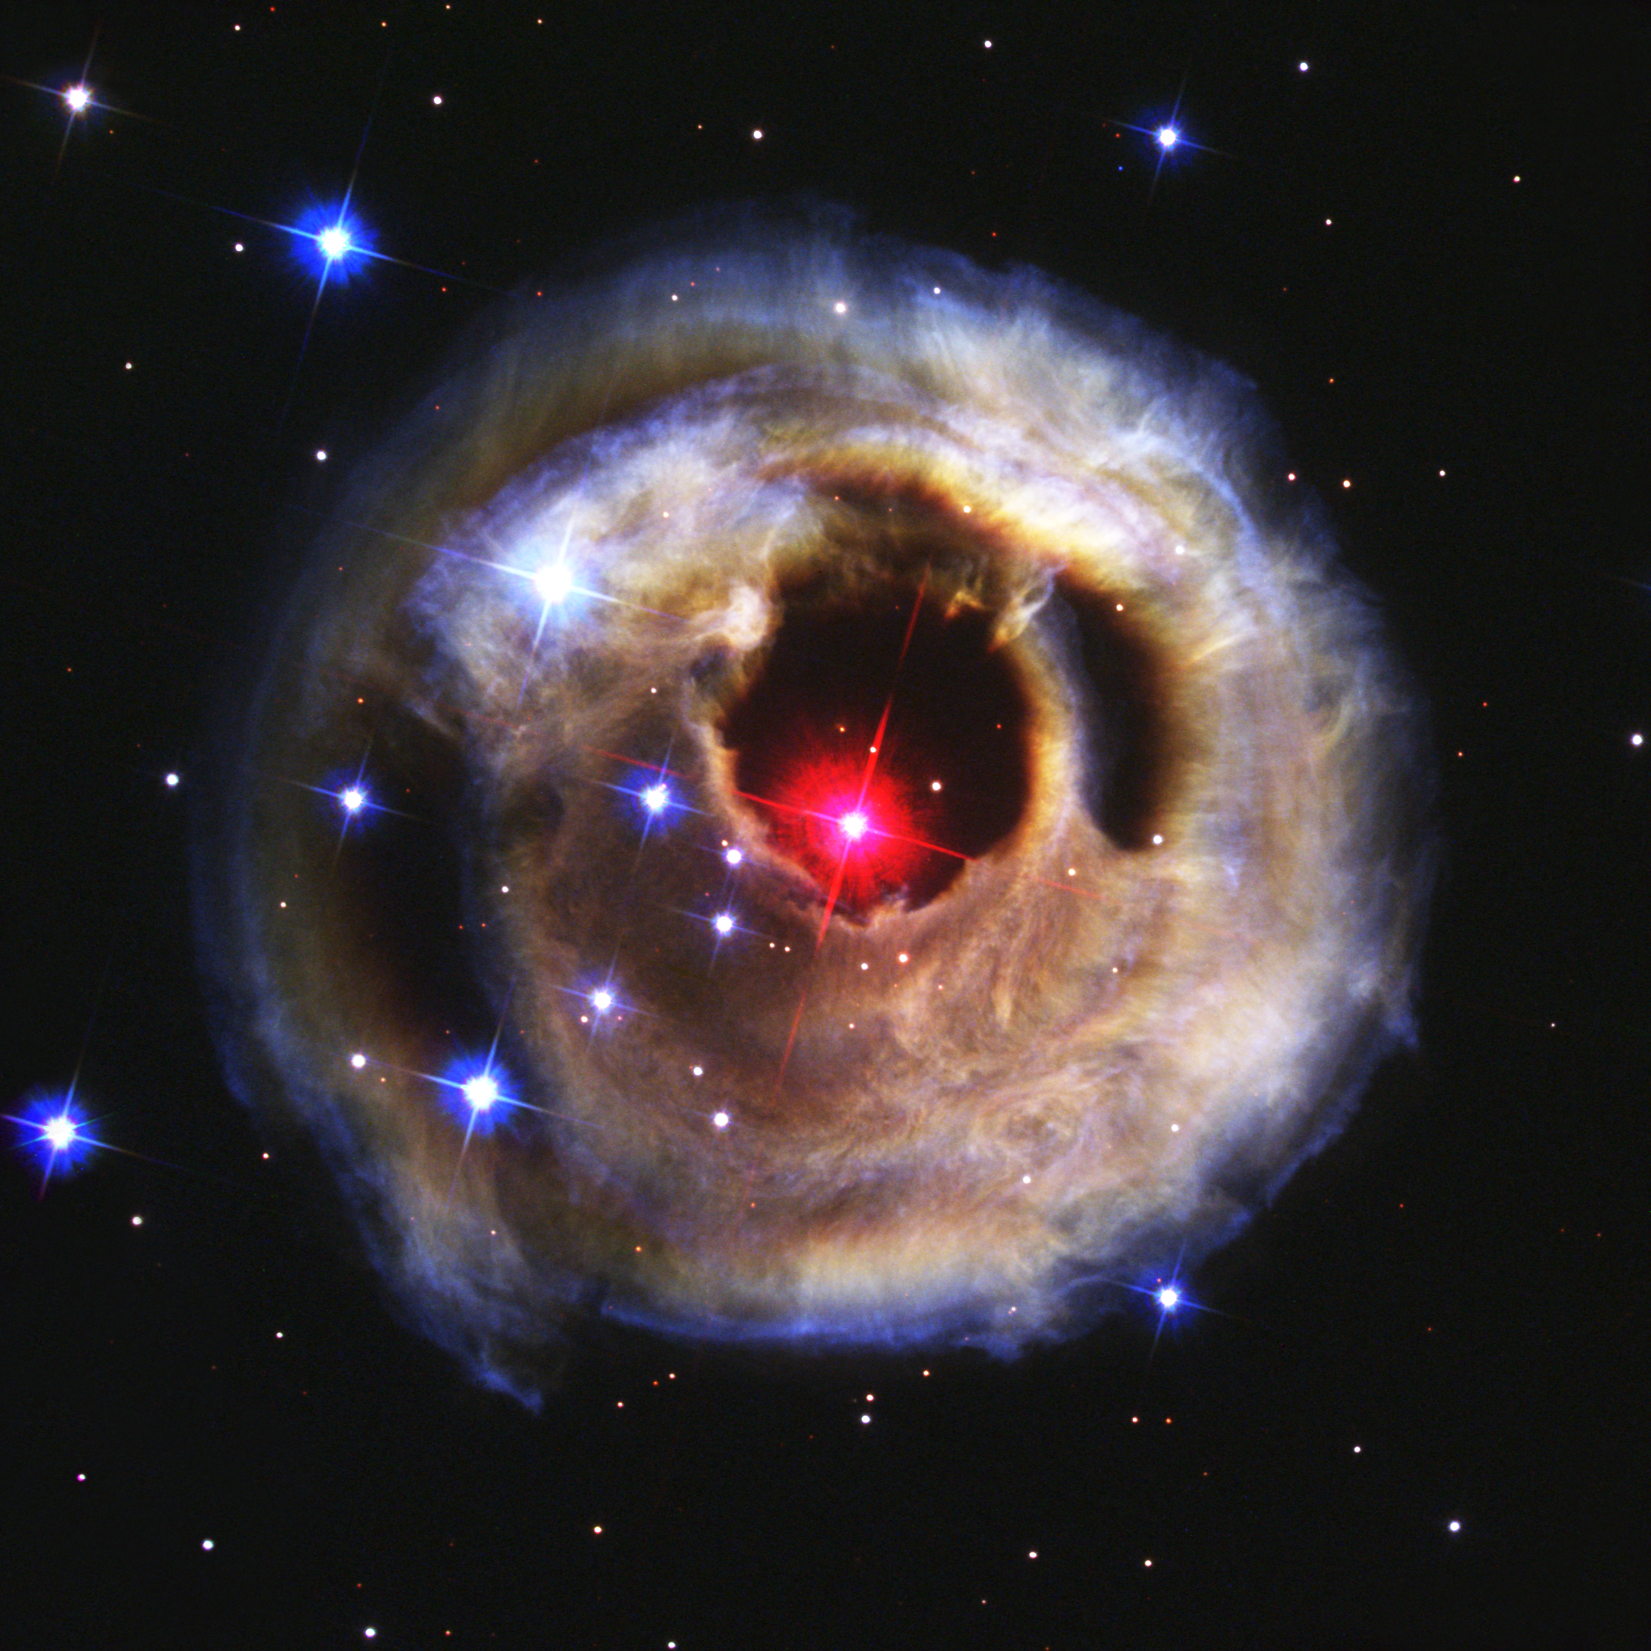

Hubble watches light echo from mysterious erupting star (September 2002 image)

This is the second in a sequence of four pictures from the NASA/ESA Hubble Space Telescope's Advanced Camera for Surveys that dramatically demonstrates the echoing of light through space caused by an unusual stellar outburst in January 2002.

The image was taken 2 September 2002. The image is combined from exposures taken through blue (B), green (V), and infrared (I) filters.

Credit: NASA, European Space Agency, and H.E. Bond (STScI)